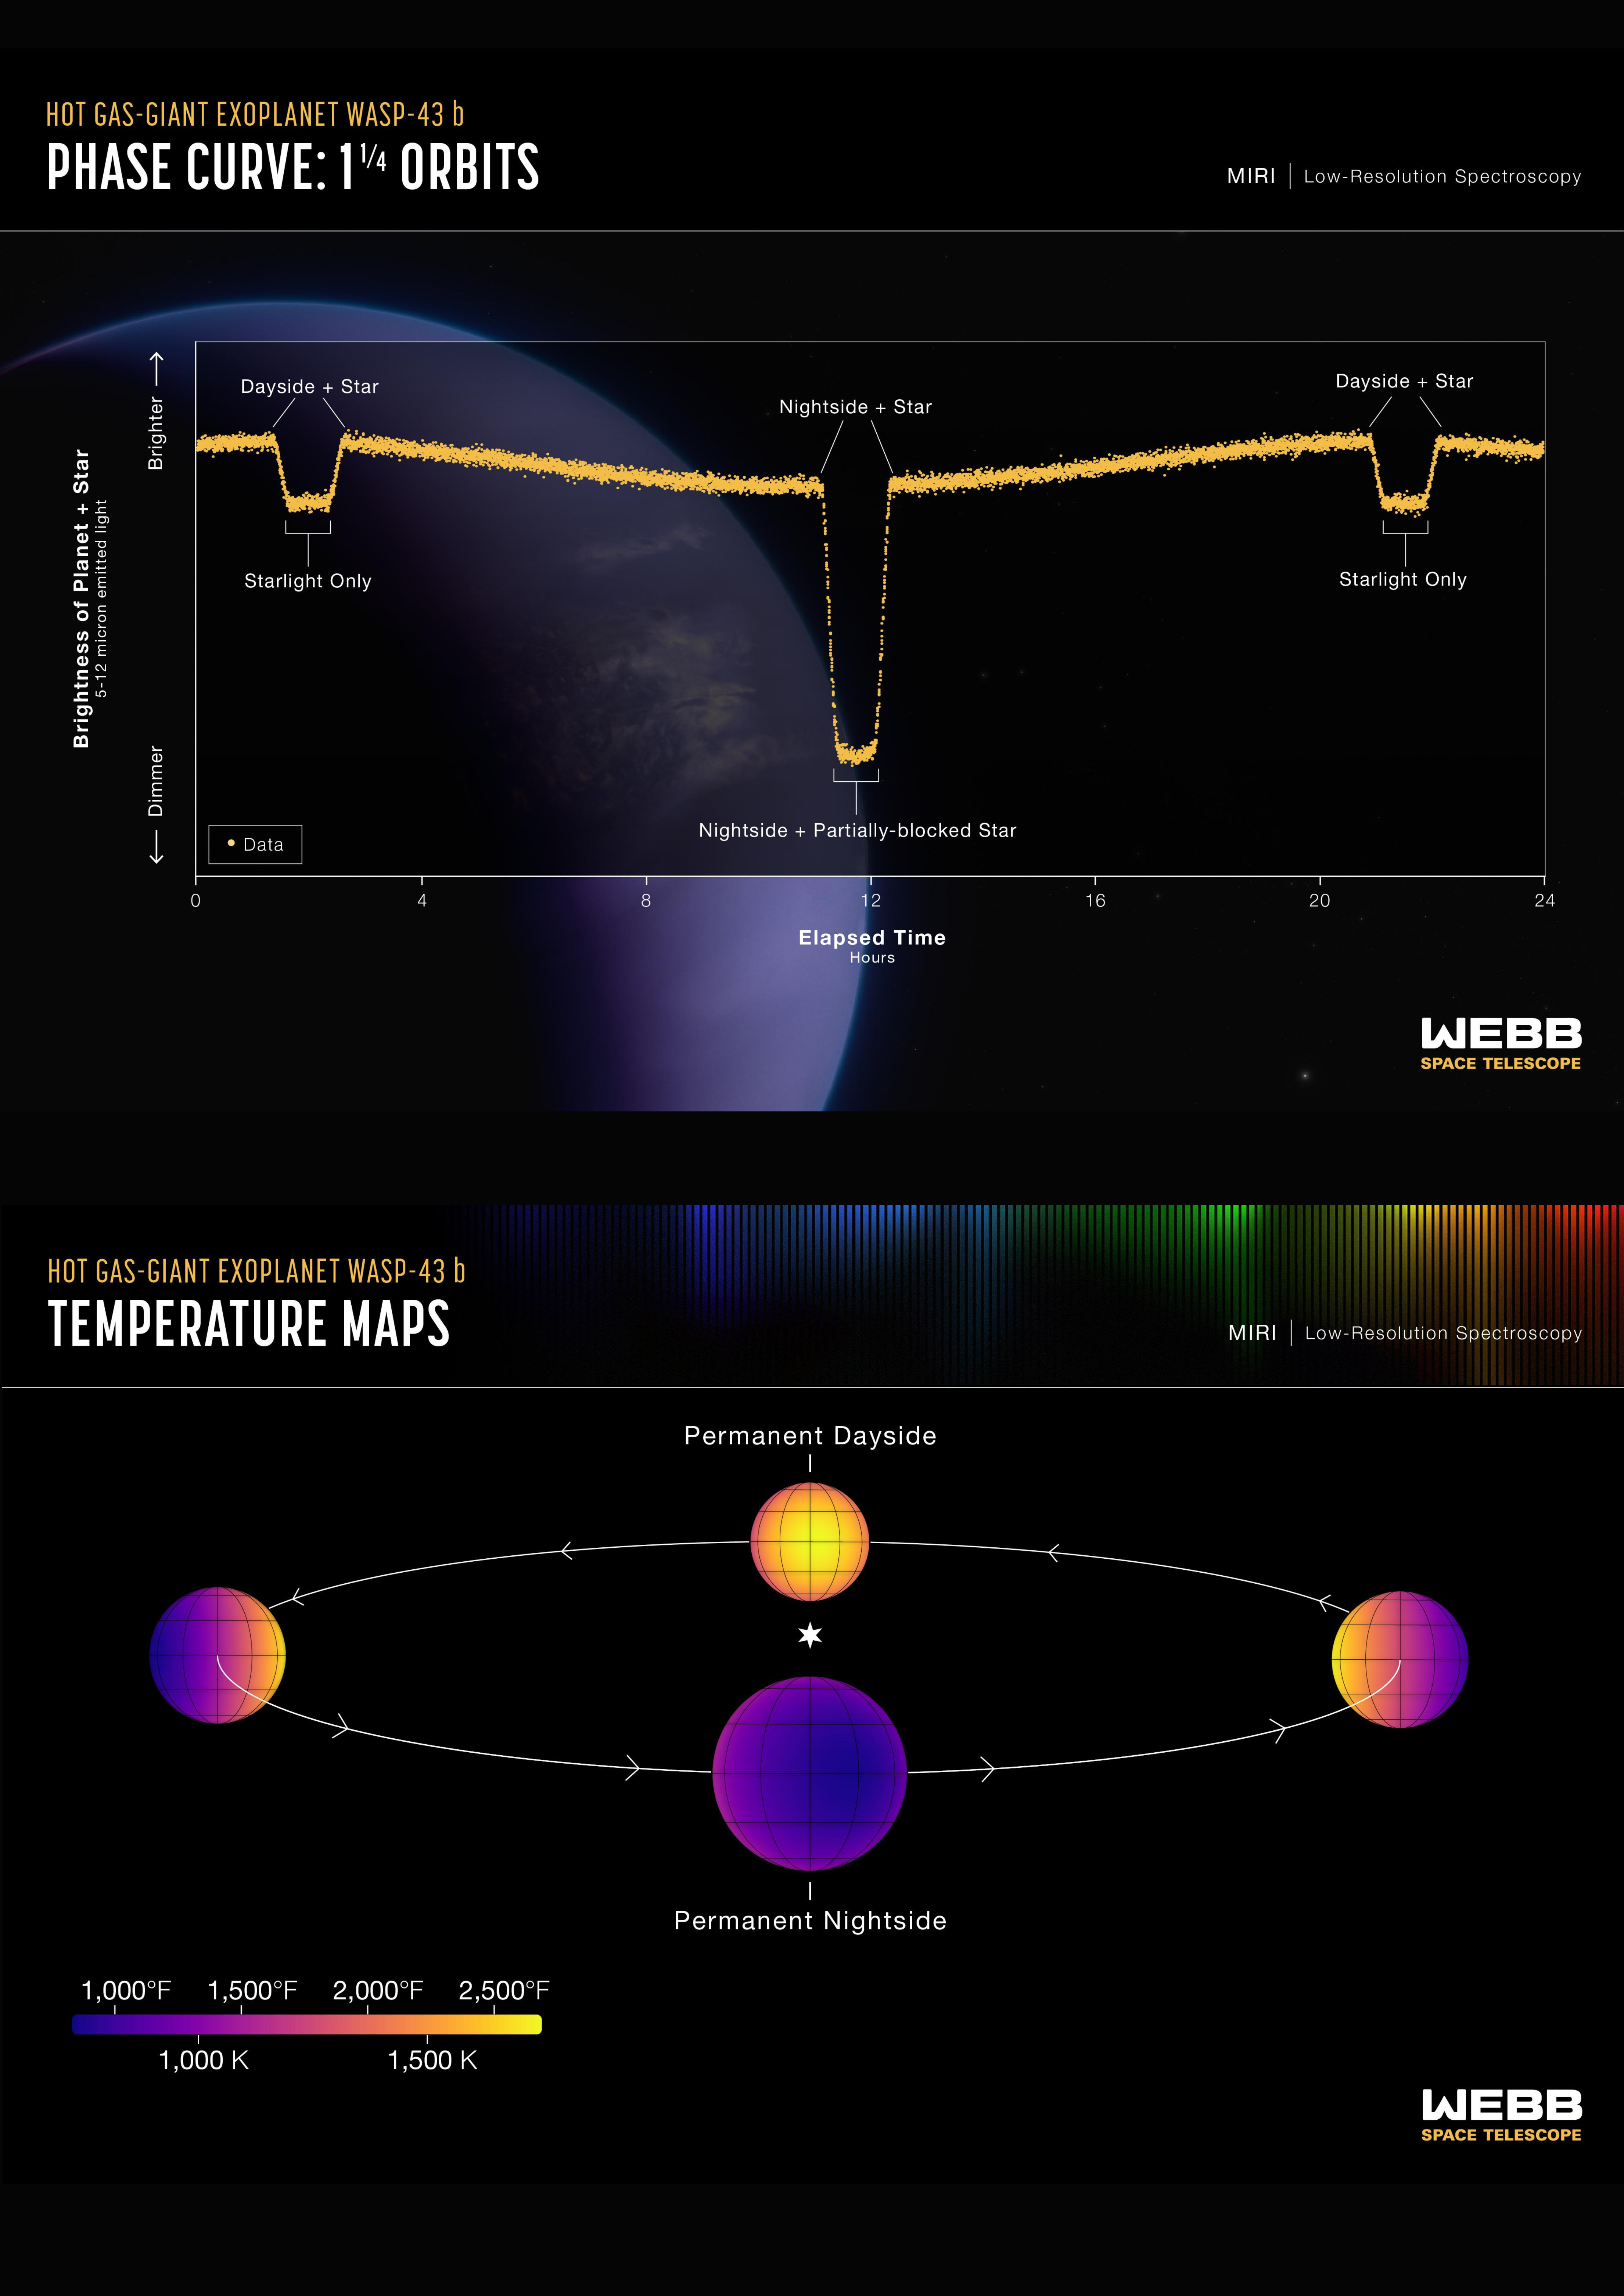

Hot gas giant exoplanet WASP-43 b (MIRI phase curve and temperature map)

Top: This light curve shows the change in brightness of the WASP-43 system over time as the planet orbits the star. This type of light curve is known as a phase curve because it includes the entire orbit, or all phases of the planet.

Because it is tidally locked, different sides of WASP-43 b rotate into view as it orbits. The system appears brightest when the hot dayside is facing the telescope, just before and after the secondary eclipse when the planet passes behind the star. The system grows dimmer as the planet continues its orbits and the nightside rotates into view. After the transit when the planet passes in front of the star, blocking some of the starlight, the system brightens again as the dayside rotates back into view.

This graph shows more than 8,000 measurements of 5- to 12-micron mid-infrared light captured over a single 24-hour observation using the low-resolution spectroscopy mode on Webb’s MIRI (Mid-Infrared Instrument). By subtracting the amount of light contributed by the star, astronomers can calculate the amount coming from the visible side of the planet as it orbits. Webb was able to detect differences in brightness as small as 0.004% (40 parts per million).

Since the amount of mid-infrared light given off by an object is directly related to its temperature, astronomers were able to use these measurements to calculate the average temperature of different sides of the planet.

Bottom: Temperature maps and graph of average temperature of the visible side of the hot gas giant exoplanet WASP-43 b, as the planet orbits its star.

The temperatures were calculated based on the brightness of 5- to 12-micron mid-infrared light detected from the star-planet system by MIRI (the Mid-Infrared Instrument) on the NASA/ESA/CSA James Webb Space Telescope. In general, the hotter an object is, the more mid-infrared light it gives off.

Because WASP-43 b orbits so close to its star (about 0.014 astronomical units), it is tidally locked. This results in a clear temperature difference between the dayside and nightside. The amount of infrared light detected from the planet is greatest when the hot dayside faces the telescope, just before and after it passes behind the star (a phenomenon known as a secondary eclipse). The planet appears much dimmer in infrared light when the cooler nightside faces the telescope, as it moves across the star (the transit).

The exact difference in temperature, however, also depends on factors such as wind speeds and cloud cover. Based on the MIRI observations, WASP-43 b has an average temperature of about 1,250°C on the dayside and 600°C on the nightside. This is consistent with strong winds that carry heat around from the dayside to the nightside, and the presence of nightside clouds that prevent heat energy from escaping to space.

The temperature maps were made by carefully analysing the change in temperature as different parts of the planet rotate into and out of view. The research indicates that the hottest point on the planet is not the point that receives the most light from the star (the substellar point, where the star is straight above in the sky). Instead, it is shifted about 7 degrees eastward. (This is why the maps look slightly off-centre.) This is a result of strong equatorial winds, which blow at speeds upwards of roughly 8000 kilometres per hour, moving the hot air horizontally before it can radiate energy back out to space.

WASP-43 b orbits a star roughly 280 light-years away, in the constellation Sextans.

Learn more here.

Credit: NASA, ESA, CSA, R. Crawford (STScI), T. Bell (BAERI), J. Barstow (The Open University), M. Roman (University of Leicester)